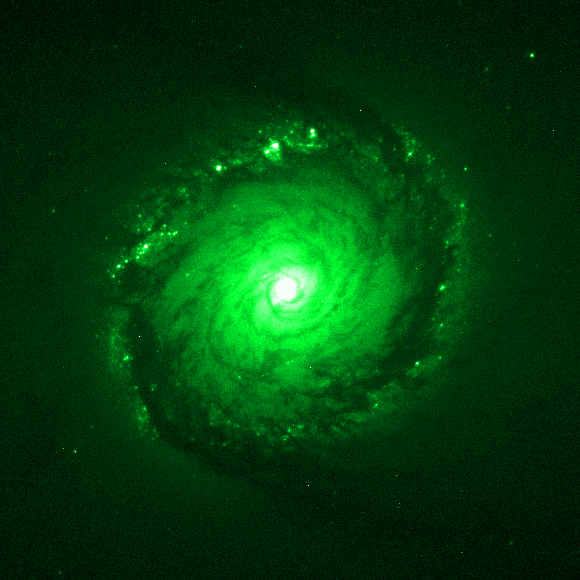

Individual colour images - 3 (WFPC2, 545 nm)

This is the third in a sequence of seven images which demonstrate the Hubble Space Telescope's wavelength range, starting in the far ultraviolet and stretching all the way to the infrared.

This image was taken by the Wide Field and Planetary Camera 2(WFPC2). The green colour (545 nm) represents visible light. The image was taken on 5 March, 1999, and has an exposure time of 900 s.

This image is issued jointly by NASA and ESA.

Credit: NASA, ESA, Dan Maoz (Tel-Aviv University, Israel, and Columbia University, USA)